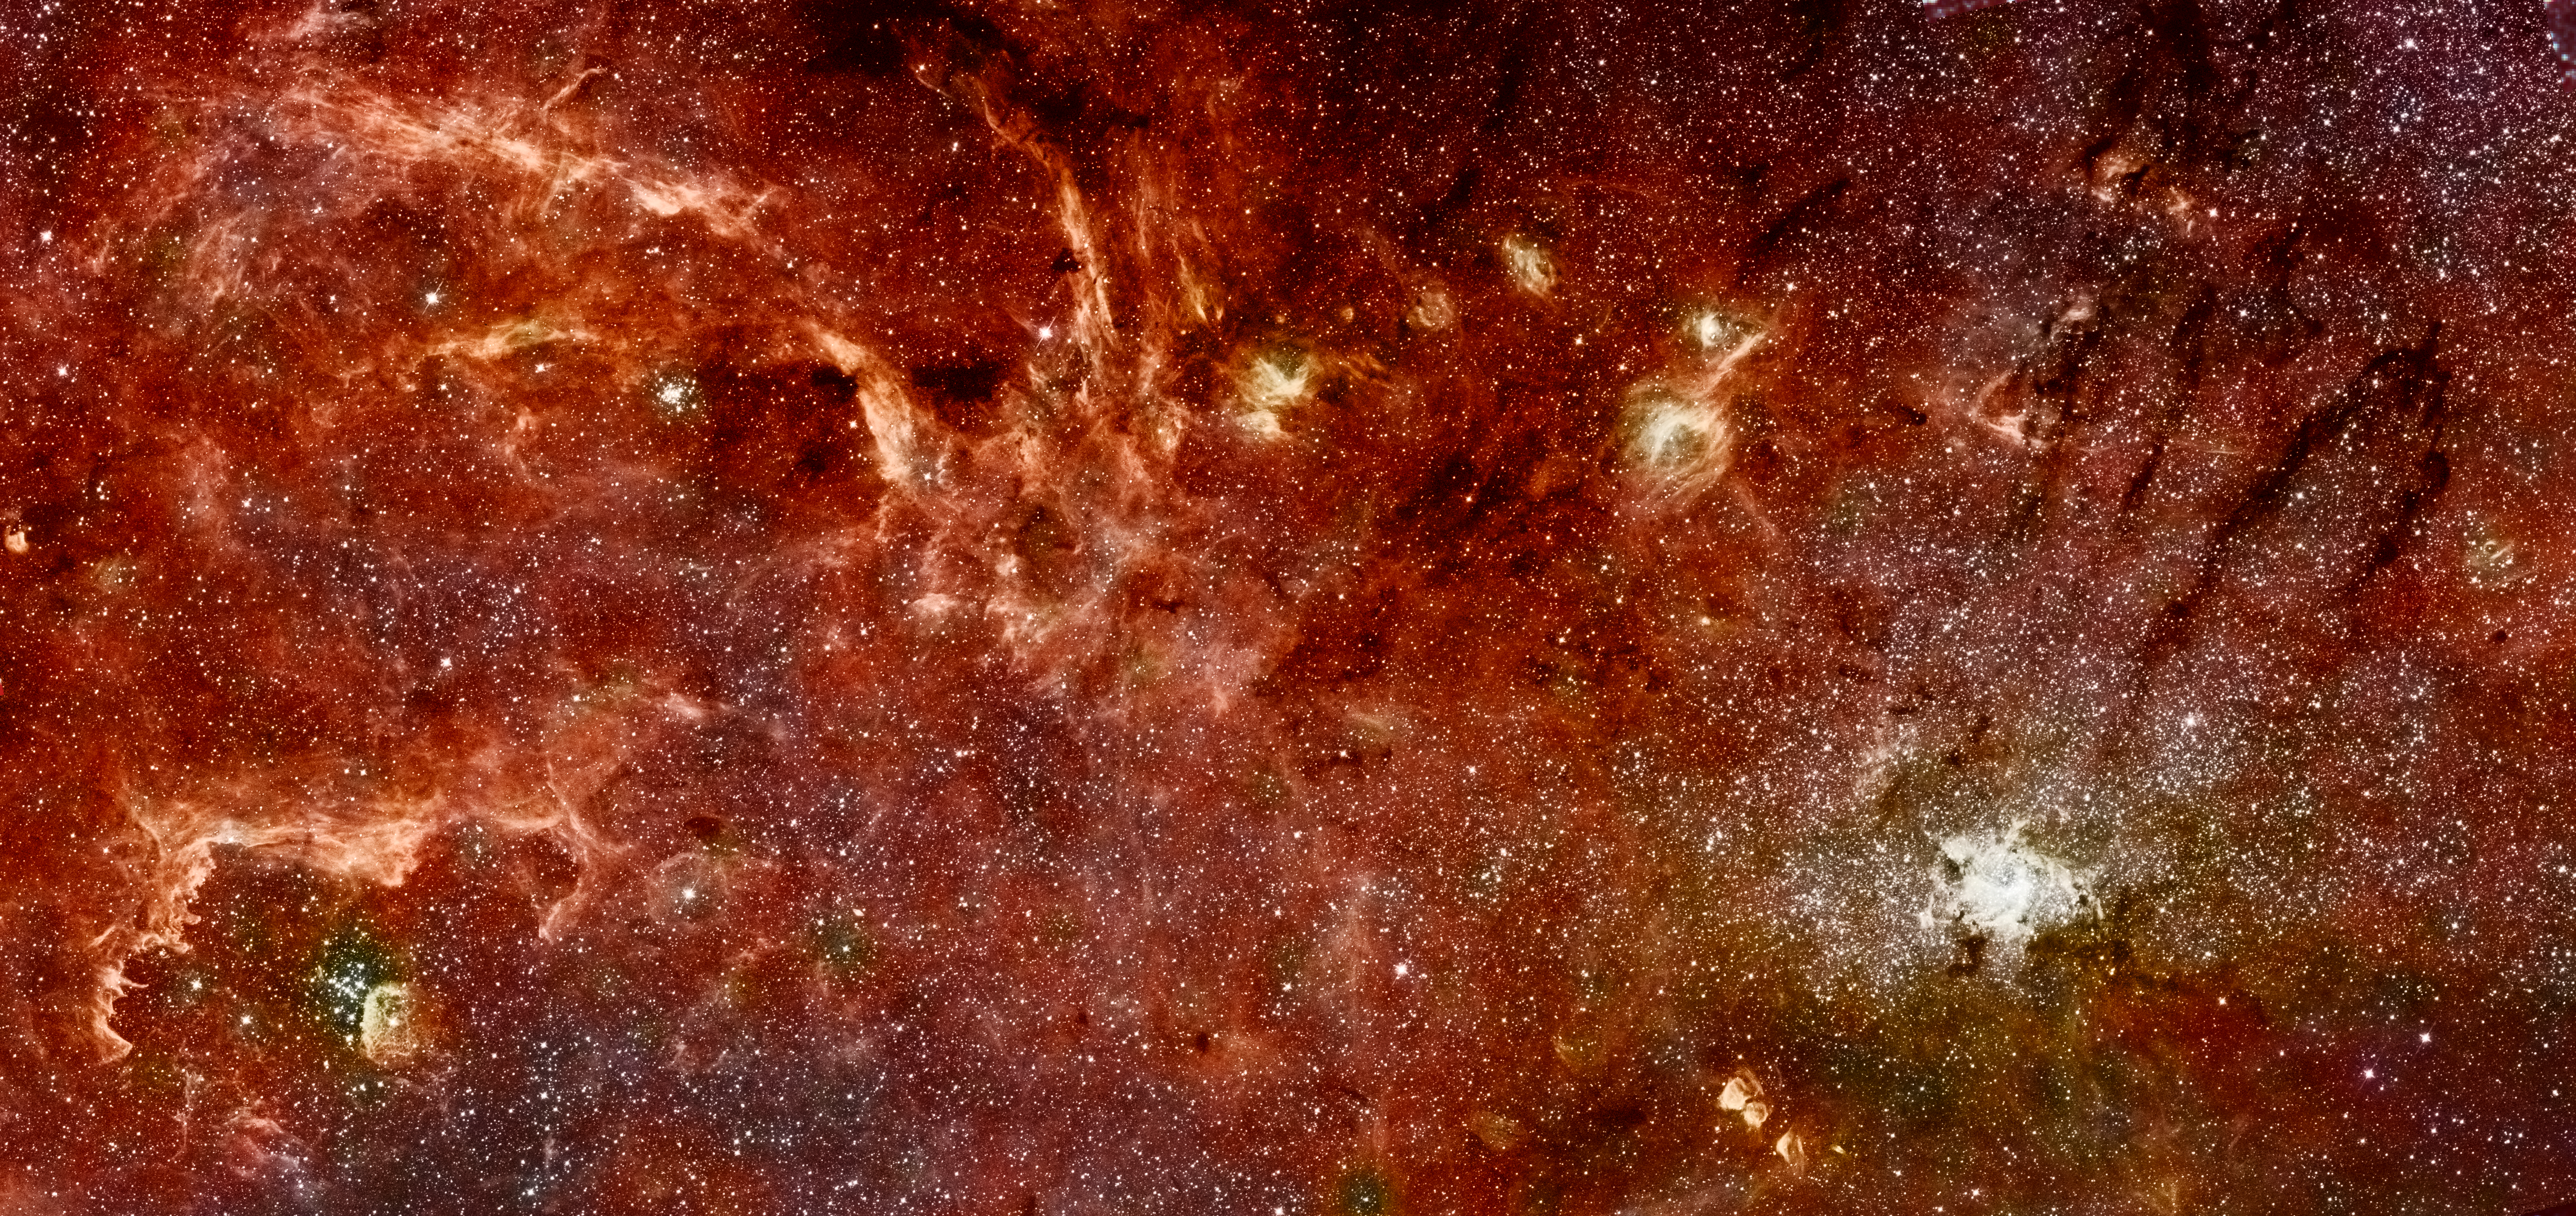

Hubble-Spitzer colour mosaic of the galactic centre

This composite colour infrared image of the centre of our Milky Way galaxy reveals a new population of massive stars and new details in complex structures in the hot ionised gas swirling around the central 300 light-years. This sweeping panorama is the sharpest infrared picture ever made of the Galactic core. It offers a nearby laboratory for how massive stars form and influence their environment in the often violent nuclear regions of other galaxies.

Credit: NASA, ESA and Q.D. Wang (University of Massachusetts, Amherst)